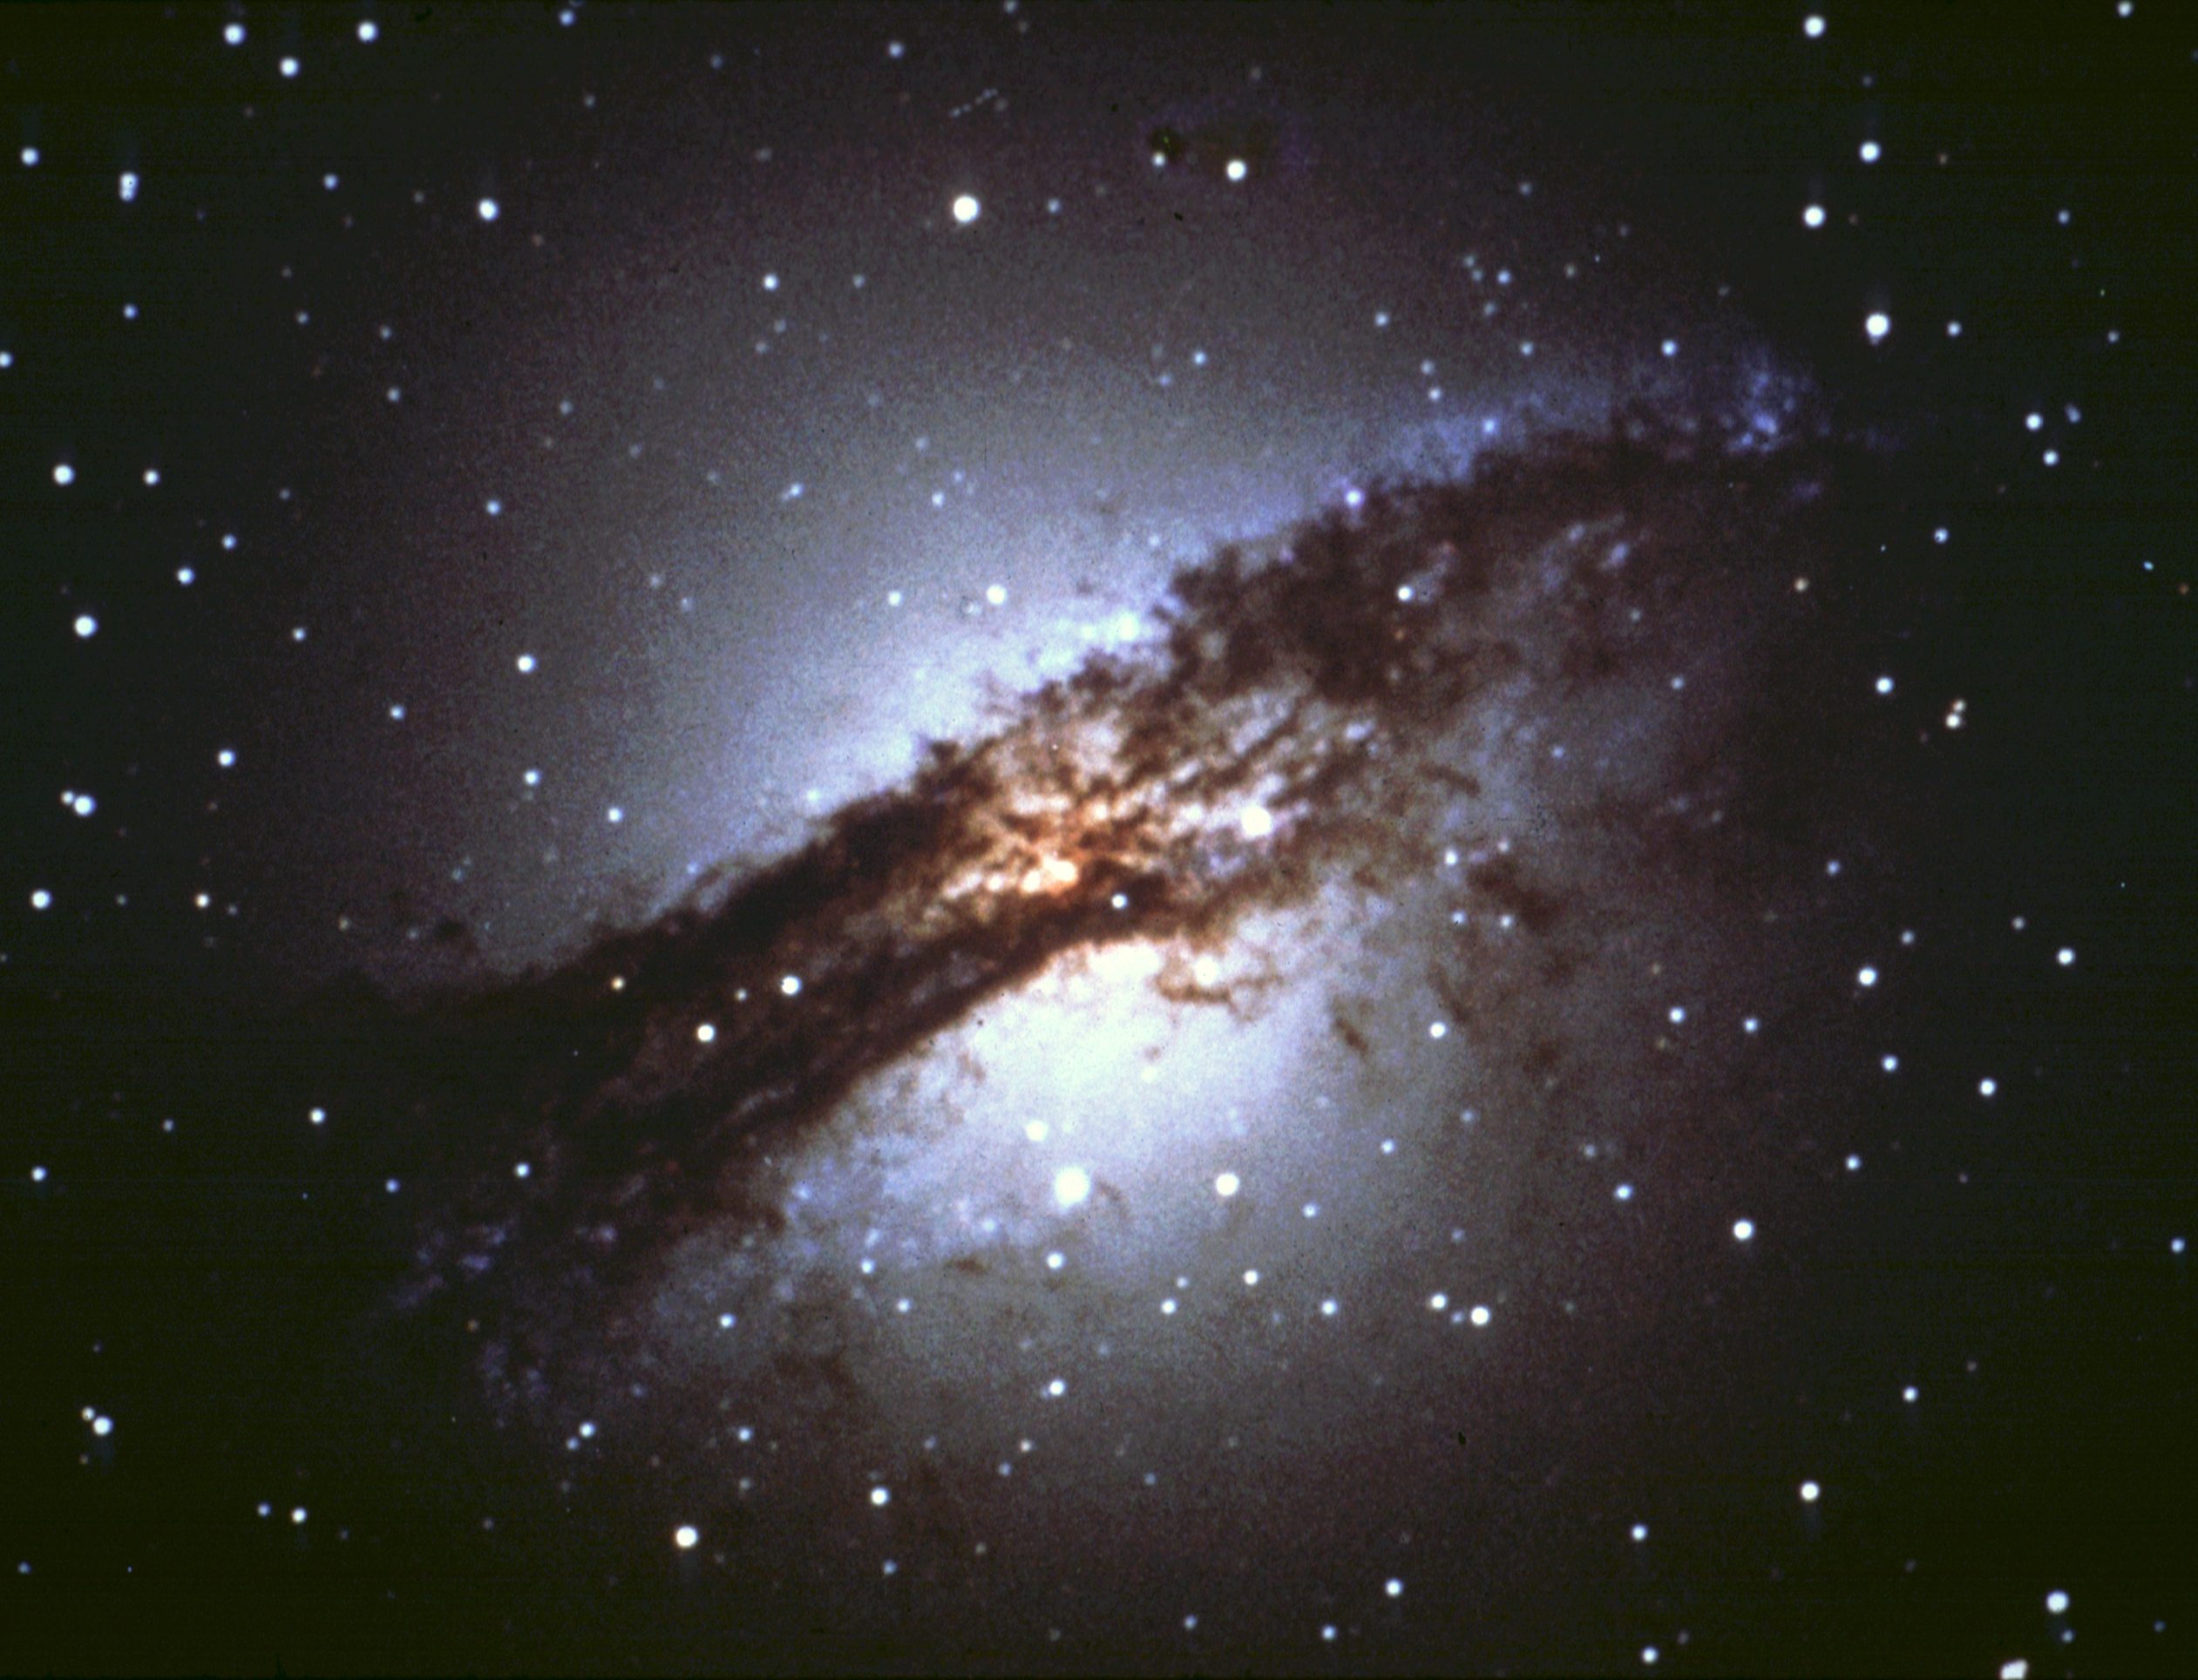

Turbulent Cauldron of Starbirth in nearby active galaxy (ground-based image)

This ground-based telescopic view shows that the dust lane girdles the entire elliptical galaxy. This lane has long been considered the dust remnant of a smaller spiral galaxy that merged with the large elliptical galaxy.

Credit: NOAO